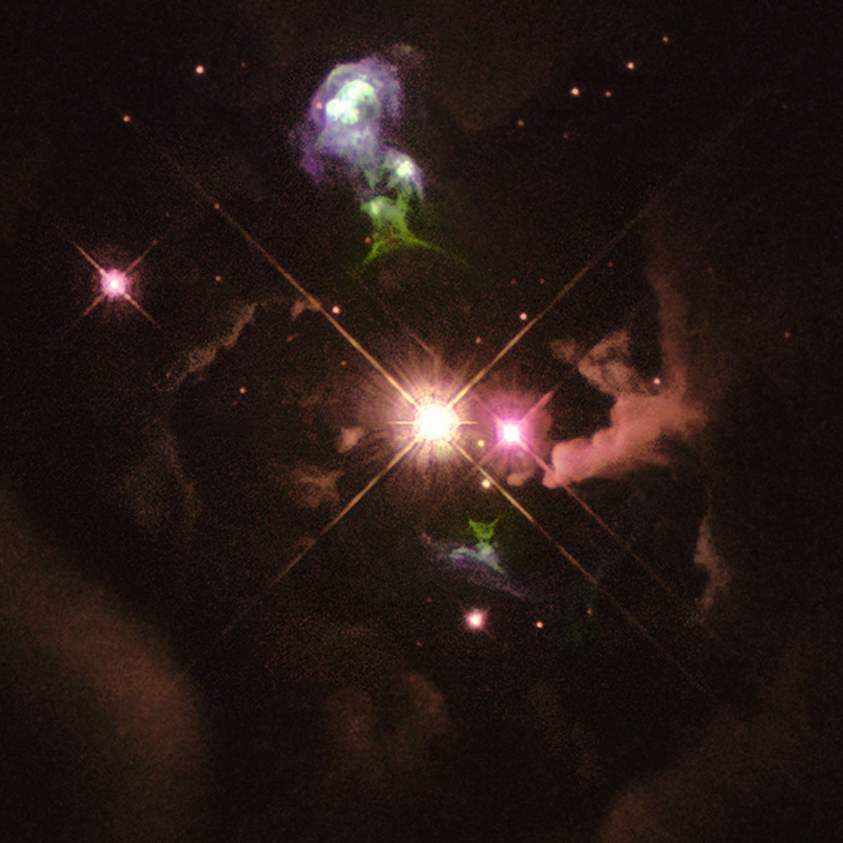

Hubble Heritage Project's First Anniversary. A View of HH 32

HH 32 is an excellent example of a 'Herbig-Haro object', which is formed when young stars eject jets of material back into interstellar space. This object, about 1,000 light-years from Earth, is somewhat older than Hubble's variable nebula, and the wind from the bright central star has already cleared much of the dust out of the central region, thus exposing the star to direct view.

Many young stars, like the central object in HH 32, are surrounded by disks of gas and dust that form as additional material is attracted gravitationally from the surrounding nebula.

Credit: NASA/ESA/The Hubble Heritage Team (AURA/STScI)